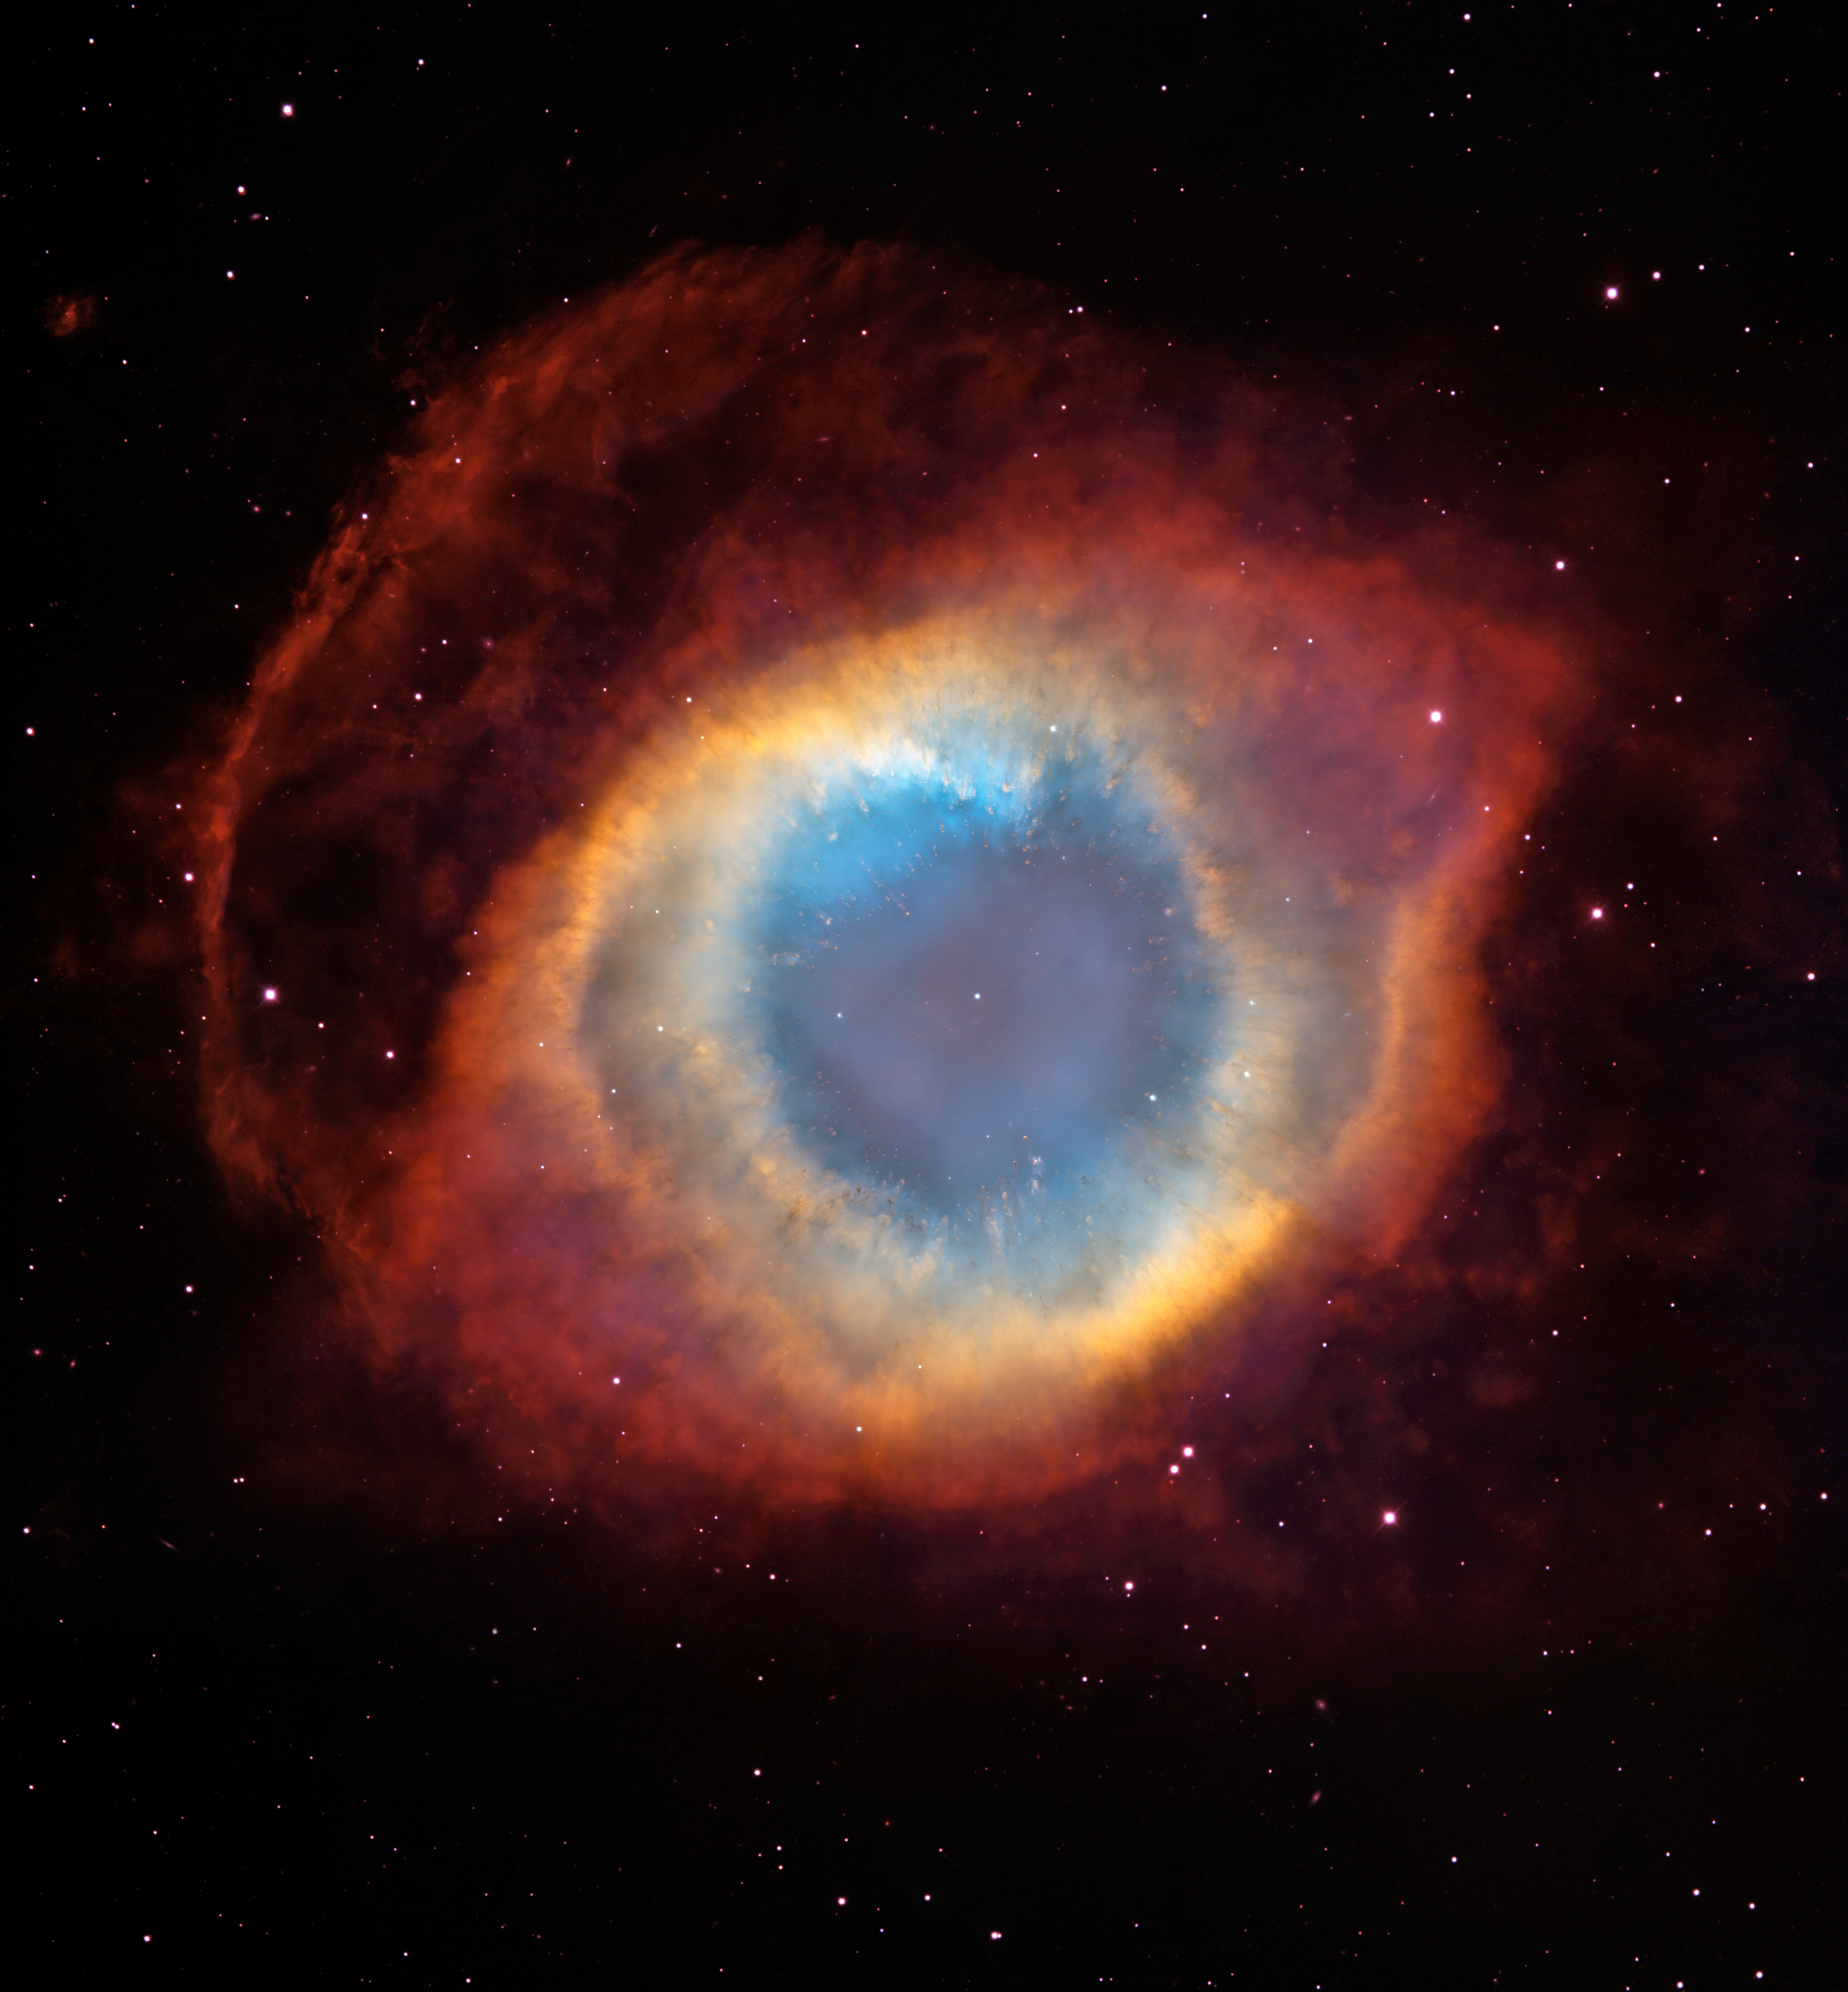

A new view of the Helix Nebula

This composite image is a view of the colorful Helix Nebula taken with the Advanced Camera for Surveys aboard NASA/ESA Hubble Space Telescope and the Mosaic II Camera on the 4-meter telescope at Cerro Tololo Inter-American Observatory in Chile. The object is so large that both telescopes were needed to capture a complete view. The Helix is a planetary nebula, the glowing gaseous envelope expelled by a dying, sun-like star. The Helix resembles a simple doughnut as seen from Earth. But looks can be deceiving. New evidence suggests that the Helix consists of two gaseous disks nearly perpendicular to each other.

Credit: NASA, ESA, C.R. O'Dell (Vanderbilt University), and M. Meixner, P. McCullough, and G. Bacon ( Space Telescope Science Institute)